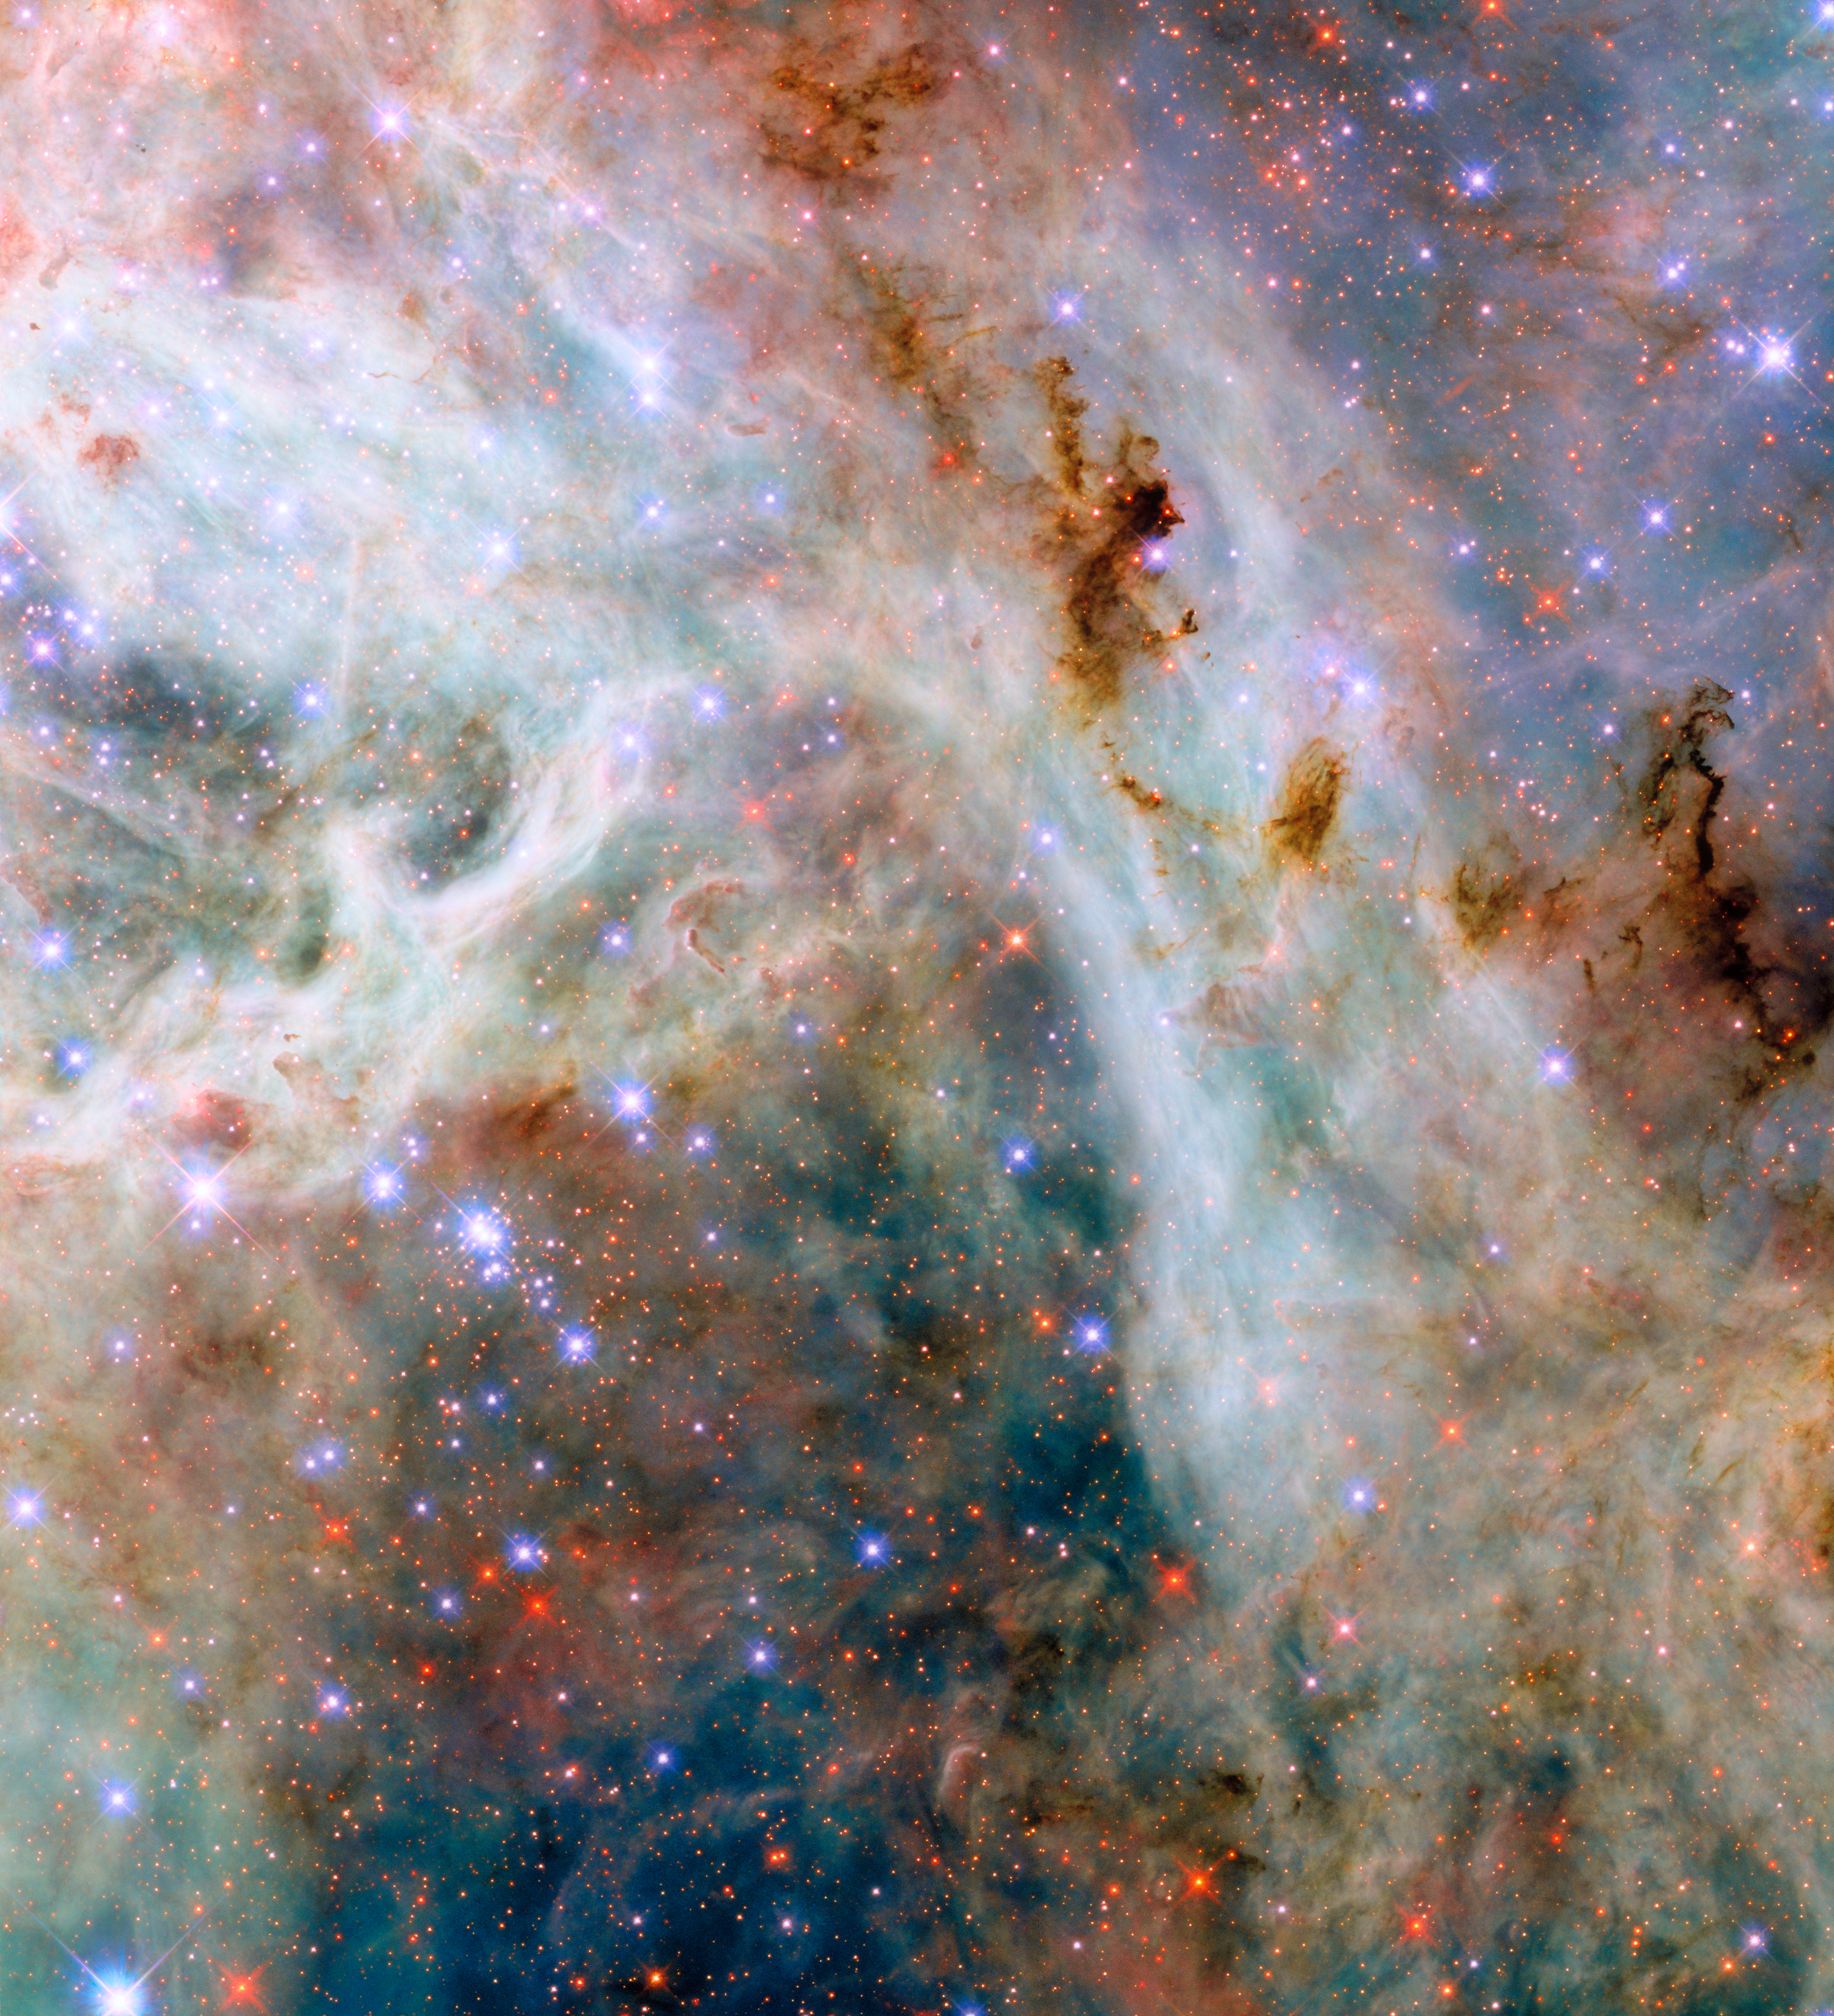

Cosmic cloudscape

The Universe is a dusty place, as this NASA/ESA Hubble Space Telescope Picture of the Week shows. Featured in this image are swirling clouds of gas and dust near the Tarantula Nebula in the Large Magellanic Cloud. About 160 000 light-years away in the constellations Dorado and Mensa, the Large Magellanic Cloud is one of the nearest galaxies to the Milky Way. The Tarantula Nebula is the most productive star-forming region in the nearby Universe, home to the most massive stars known.

The colourful gas clouds of this nebula are crossed by wispy tendrils and dark clumps of dust. This dust is different from ordinary household dust, which can be made of bits of soil, skin cells, hair and even plastic. Cosmic dust tends to be made of carbon or of molecules called silicates, which contain silicon and oxygen. The data used to create this image were collected as part of an observing programme that aims to characterise the properties of cosmic dust in the Large Magellanic Cloud and other nearby galaxies.

Dust plays several important roles in the Universe. Even though individual dust grains are incredibly tiny, far smaller than the width of a single human hair, dust grains in discs around young stars clump together to form larger grains and eventually planets. Dust also helps cool clouds of gas so that they can condense into new stars. Dust even plays a role in making new molecules in interstellar space, providing a venue for individual atoms to find each other and bond together in the vastness of space.

Credit: ESA/Hubble & NASA, C. Murray